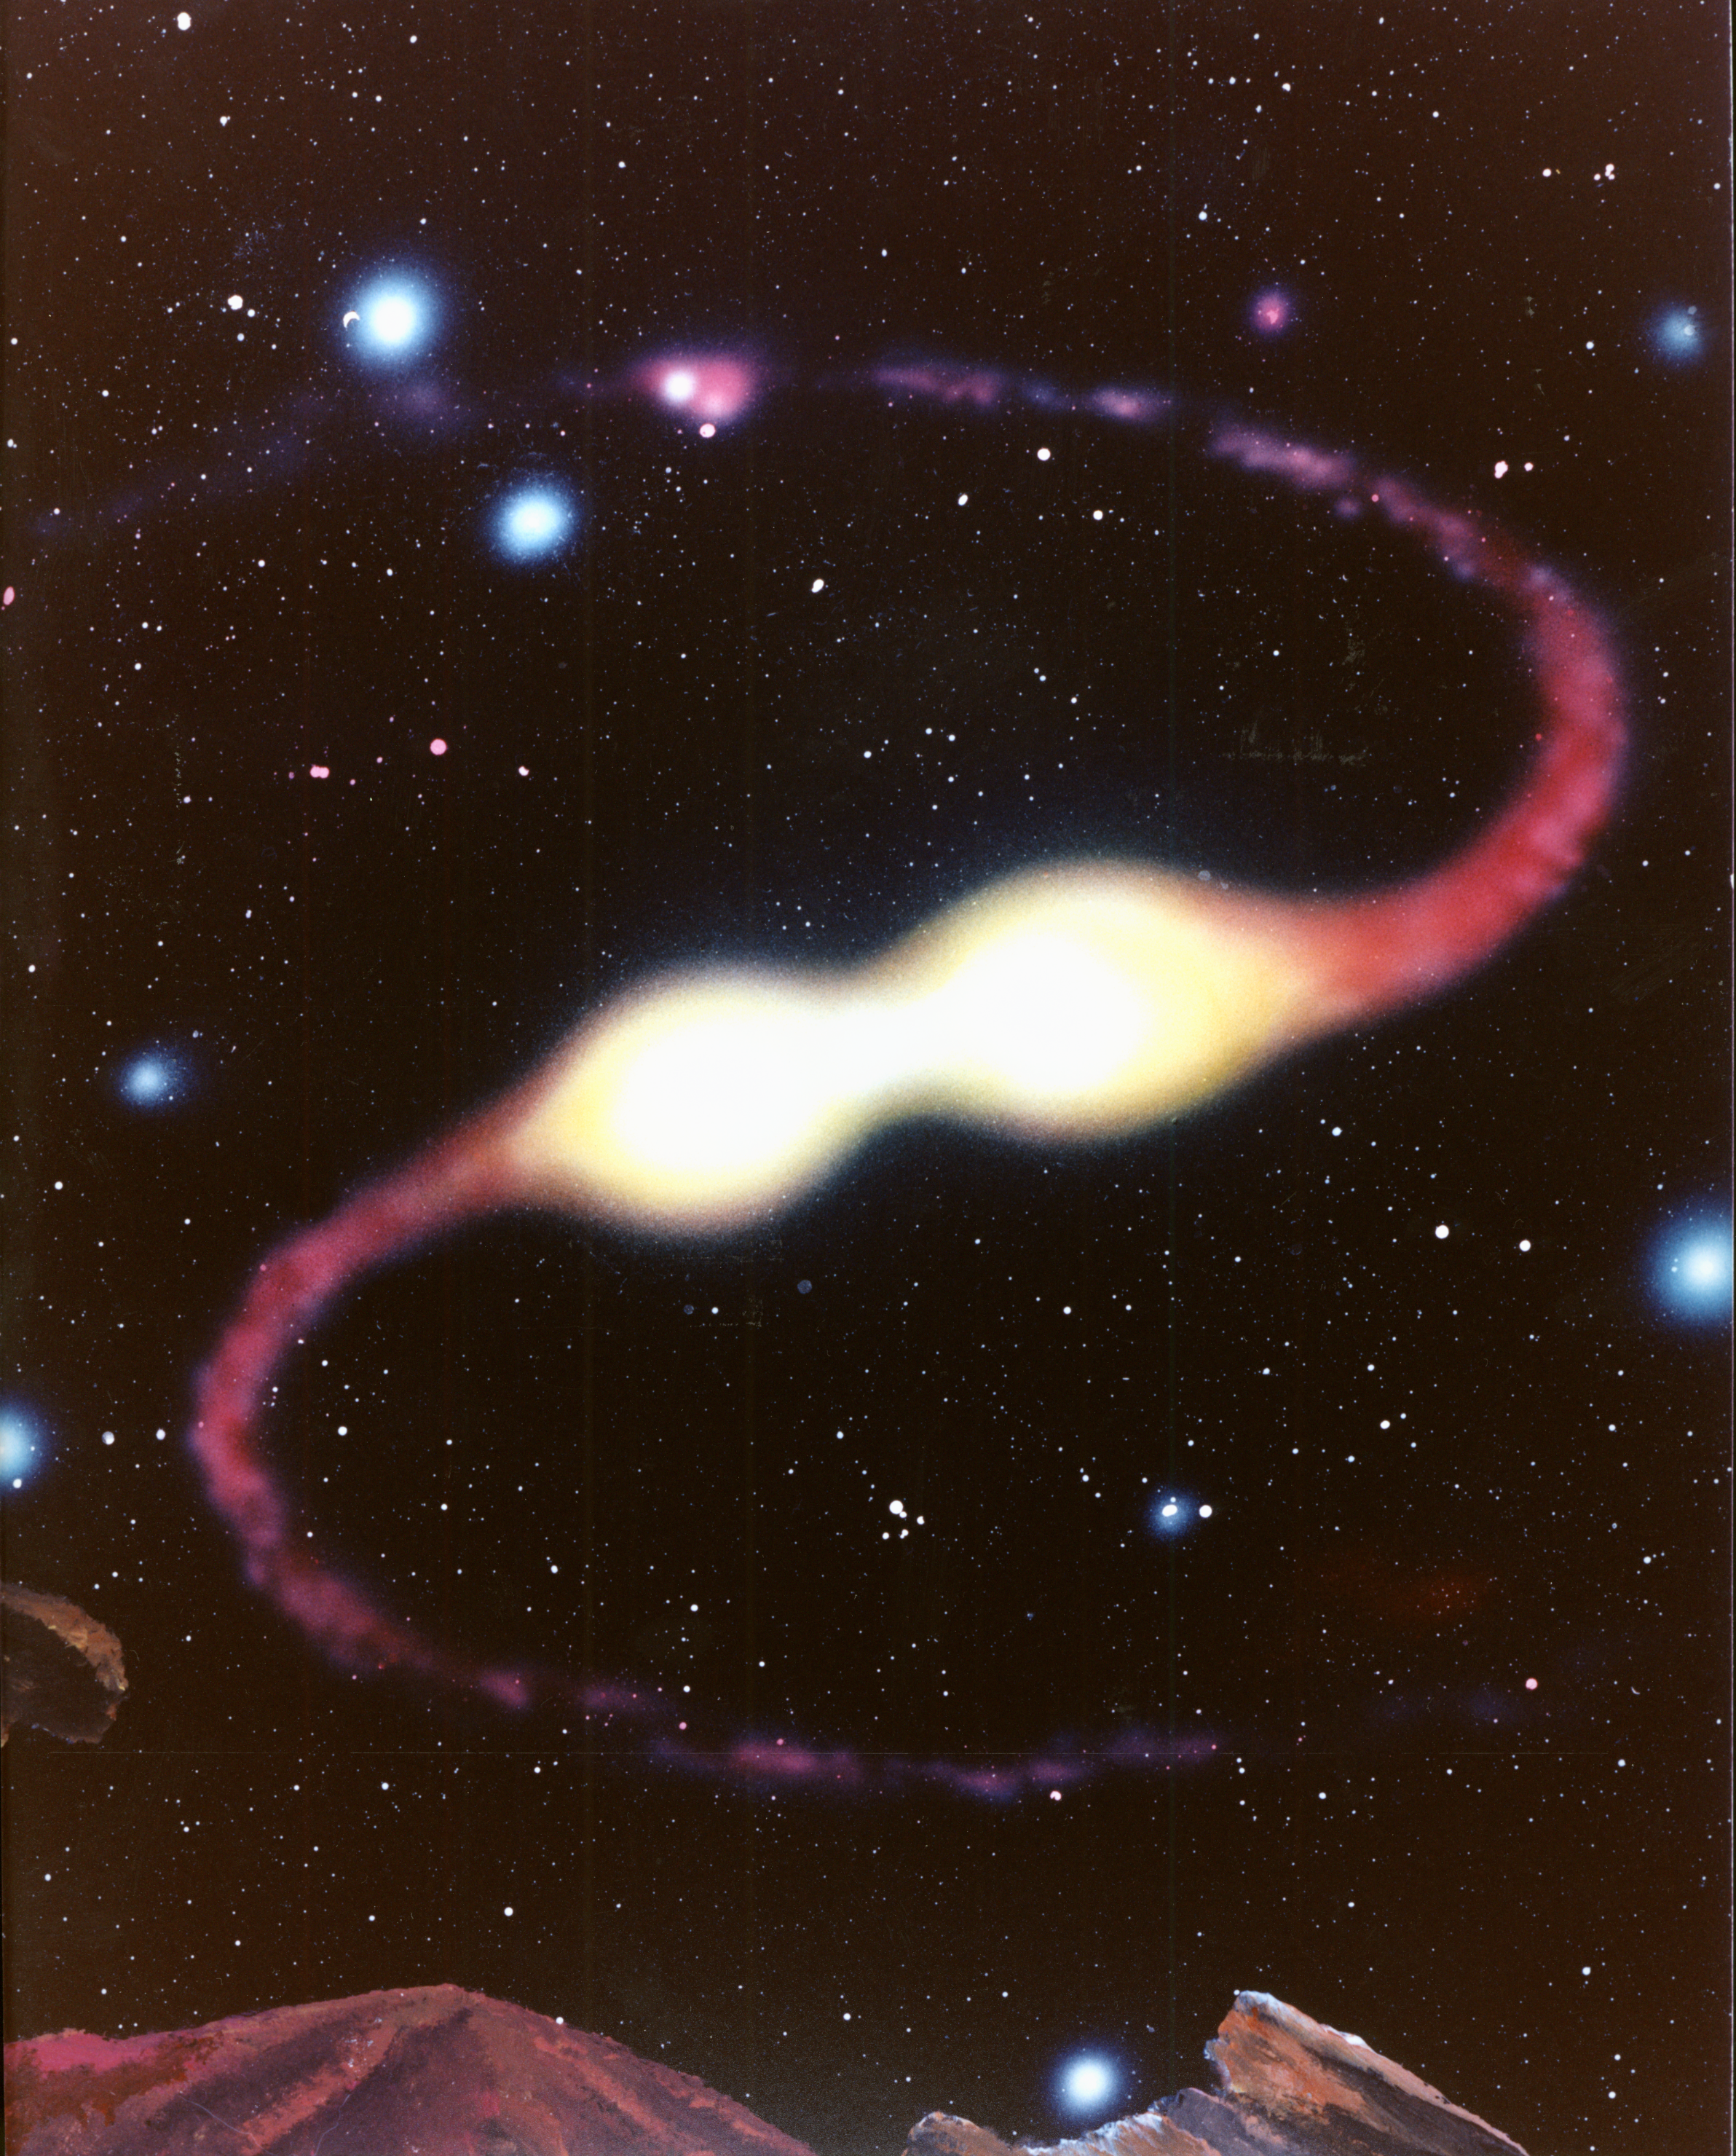

A stellar close encounter at the core of globular cluster M15 (artist's impression)

The sky is ablaze with several hundred thousand stars in the imaginary view from the surface of a hypothetical planet at the center if the globular star cluster called M15 (located 30,000 light-years away in the constellation Pegasus). The average distance between stars is a fraction of a light-year.

A new population of extremely hot and blue stars - recently discovered by NASA/ESA Hubble Space Telescope - stand out like diamonds on black velvet. At the center of the image, a bypassing star gravitationally pulls the outer envelop of gas from a red giant star. This process will expose the giant's core - the nuclear fusion "engine" that powers the star.

Credit: G. Dana Berry, STSCI